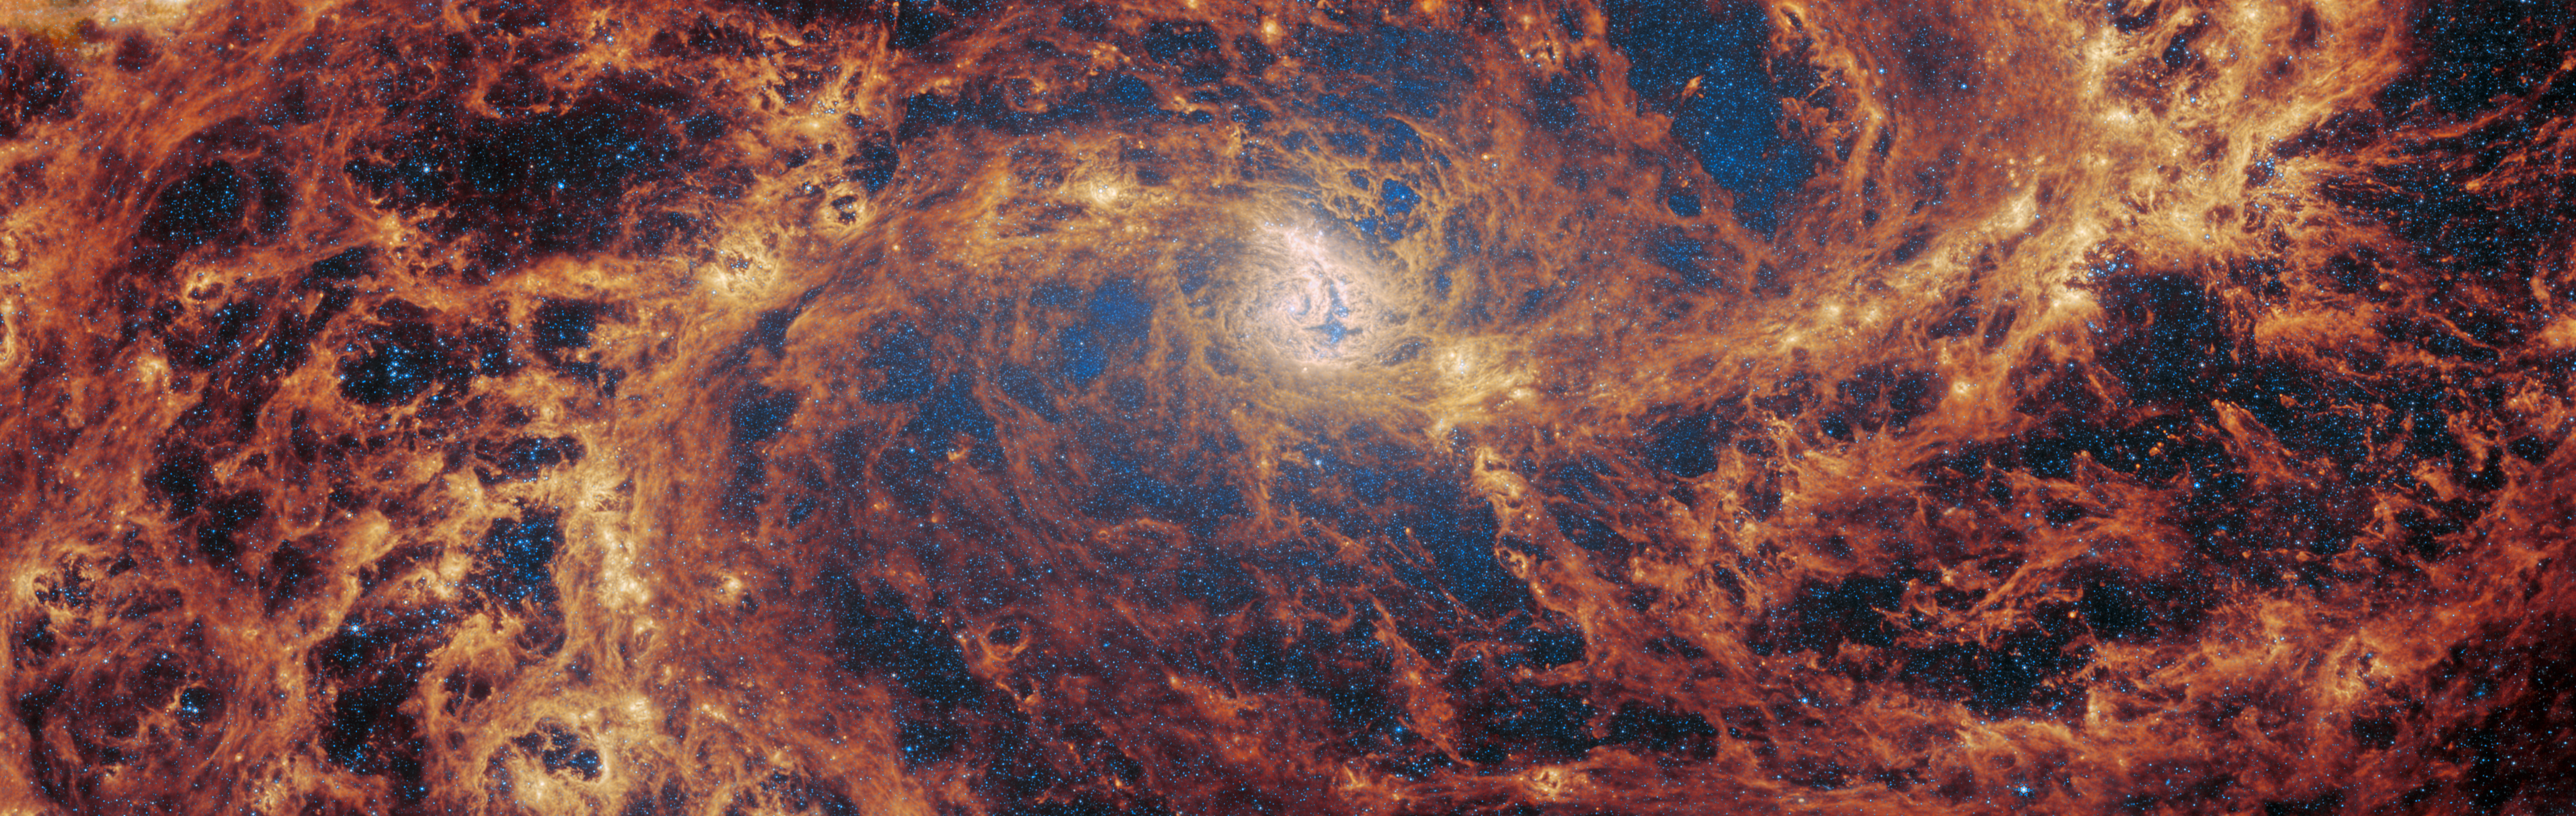

No tricks, just treats

This month, Webb presents a spectacular treat… for the eyes. The barred spiral galaxy M83 is revealed in detail by the NASA/ESA/CSA James Webb Space Telescope. M83, which is also known as NGC 5236, was observed by Webb as part of a series of observations collectively titled Feedback in Emerging extrAgalactic Star clusTers, or FEAST. Another target of the FEAST observations, M51, was the subject of a previous Webb Picture of the Month. As with all six galaxies that comprise the FEAST sample, M83 and M51 were observed with both NIRCam and MIRI, two of the four instruments that are mounted on Webb.

MIRI, or the Mid-InfraRed Instrument, makes observations in the mid-infrared, which spans wavelengths of light very different from optical wavelengths. Optical wavelengths in astronomy roughly correspond to the range of light waves that human eyes are sensitive to, and extend from about 0.38 to 0.75 micrometres (a micrometre, or micron, is one thousandth of a millimetre). By contrast, MIRI detects light from 5 to 28 micrometres — however, when it makes observations, it does not typically observe across this entire wavelength range all at once. Instead, MIRI has a set of ten filters that allow very specific regions of light through. For example, one of MIRI’s filters (dubbed F770W), allows light with wavelengths of 6.581 to 8.687 micrometres to pass through it.

This image was compiled using data collected through just two of MIRI’s ten filters, near the short end of the instrument’s wavelength range. The result is this extraordinarily detailed image, with its creeping tendrils of gas, dust and stars. In this image, the bright blue shows the distribution of stars across the central part of the galaxy. The bright yellow regions that weave through the spiral arms indicate concentrations of active stellar nurseries, where new stars are forming. The orange-red areas indicate the distribution of a type of carbon-based compound known as polycyclic aromatic hydrocarbons (or PAHs) — the F770W filter, one of the two used here, is particularly suited to imaging these important molecules.

Credit: ESA/Webb, NASA & CSA, A. Adamo (Stockholm University) and the FEAST JWST team